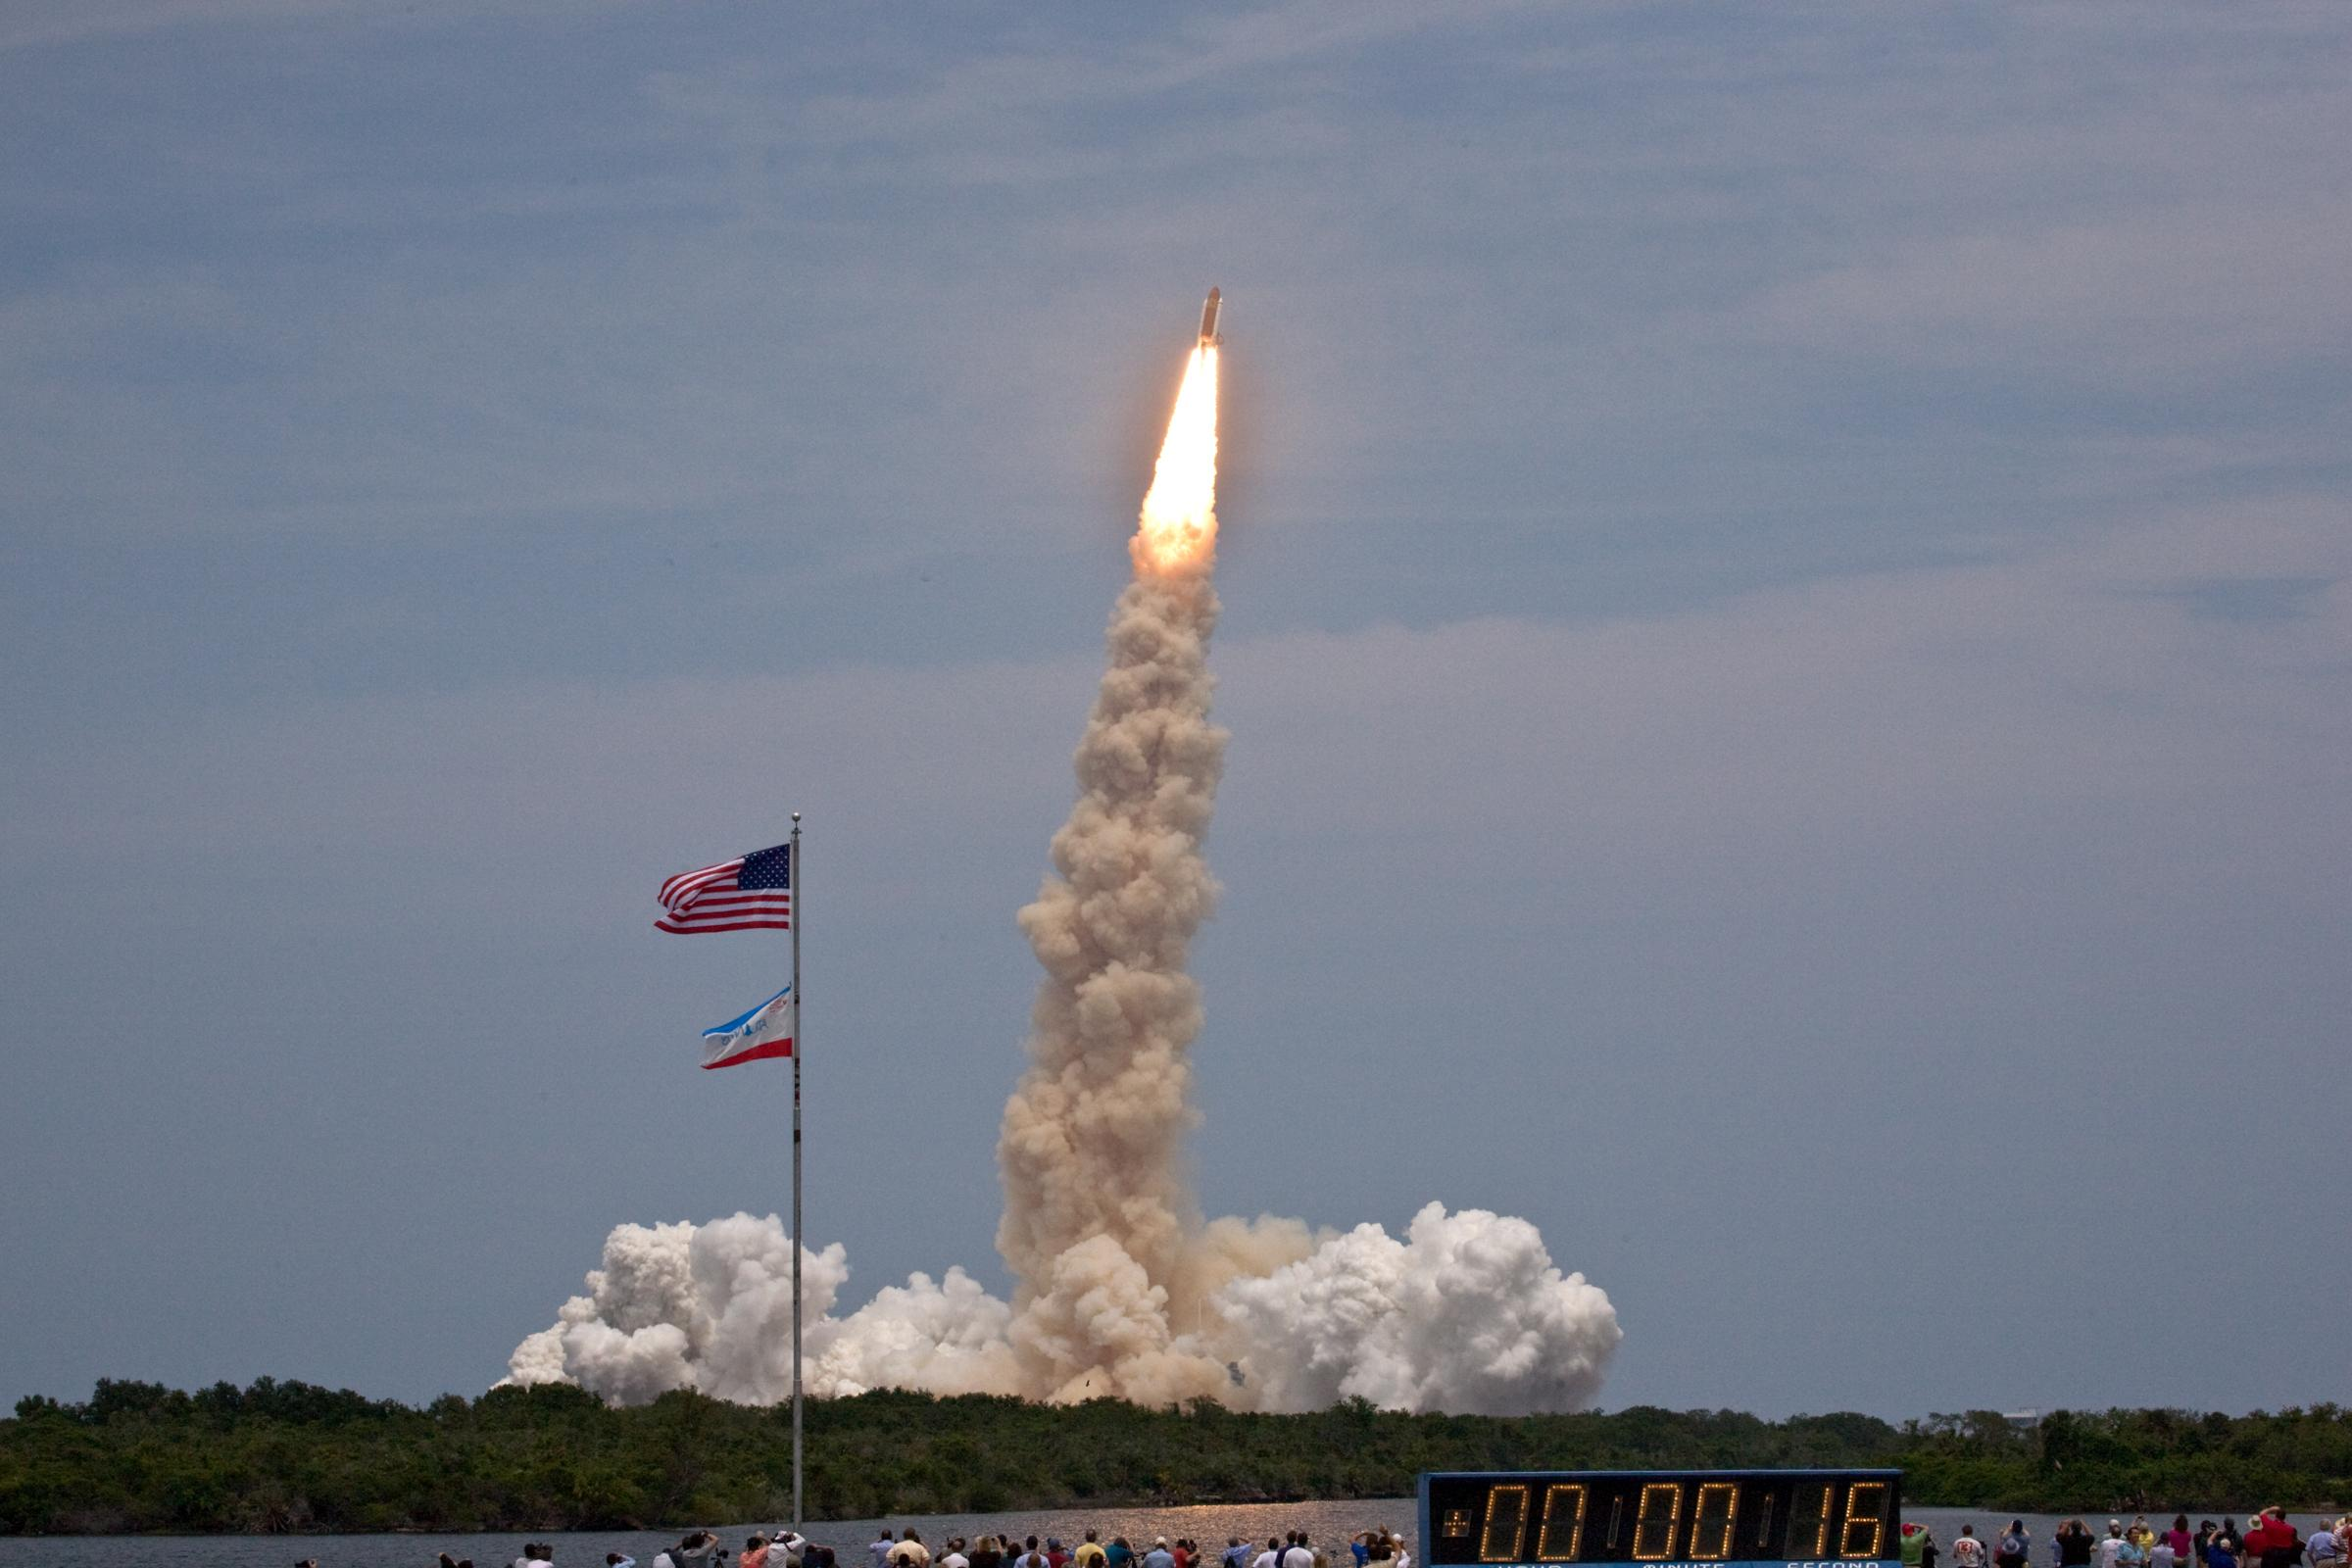

Atlantis is on its way to Hubble

In a bright, loud and visibly perfect launch, space shuttle Atlantis lifted off from Kennedy Space Center at 2:01 p.m. EDT (20:01 CEST). The seven astronauts of STS-125 are headed for their rendezvous with Hubble Space Telescope.

Over an 11-day mission, veteran astronauts Scott Altman, Gregory C. Johnson, John Grunsfeld and Mike Massimino and rookies Andrew Feustel, Michael Good and Megan McArthur will install two new instruments, repair two inactive ones and perform the component replacements that will keep the telescope functioning into at least 2014.

Atlantis also will carry a replacement Science Instrument Command and Data Handling Unit for Hubble. Astronauts will install the unit on the telescope, removing the one that stopped working on Sept. 27, 2008, delaying the servicing mission until the replacement was ready.

Credit: NASA & ESA